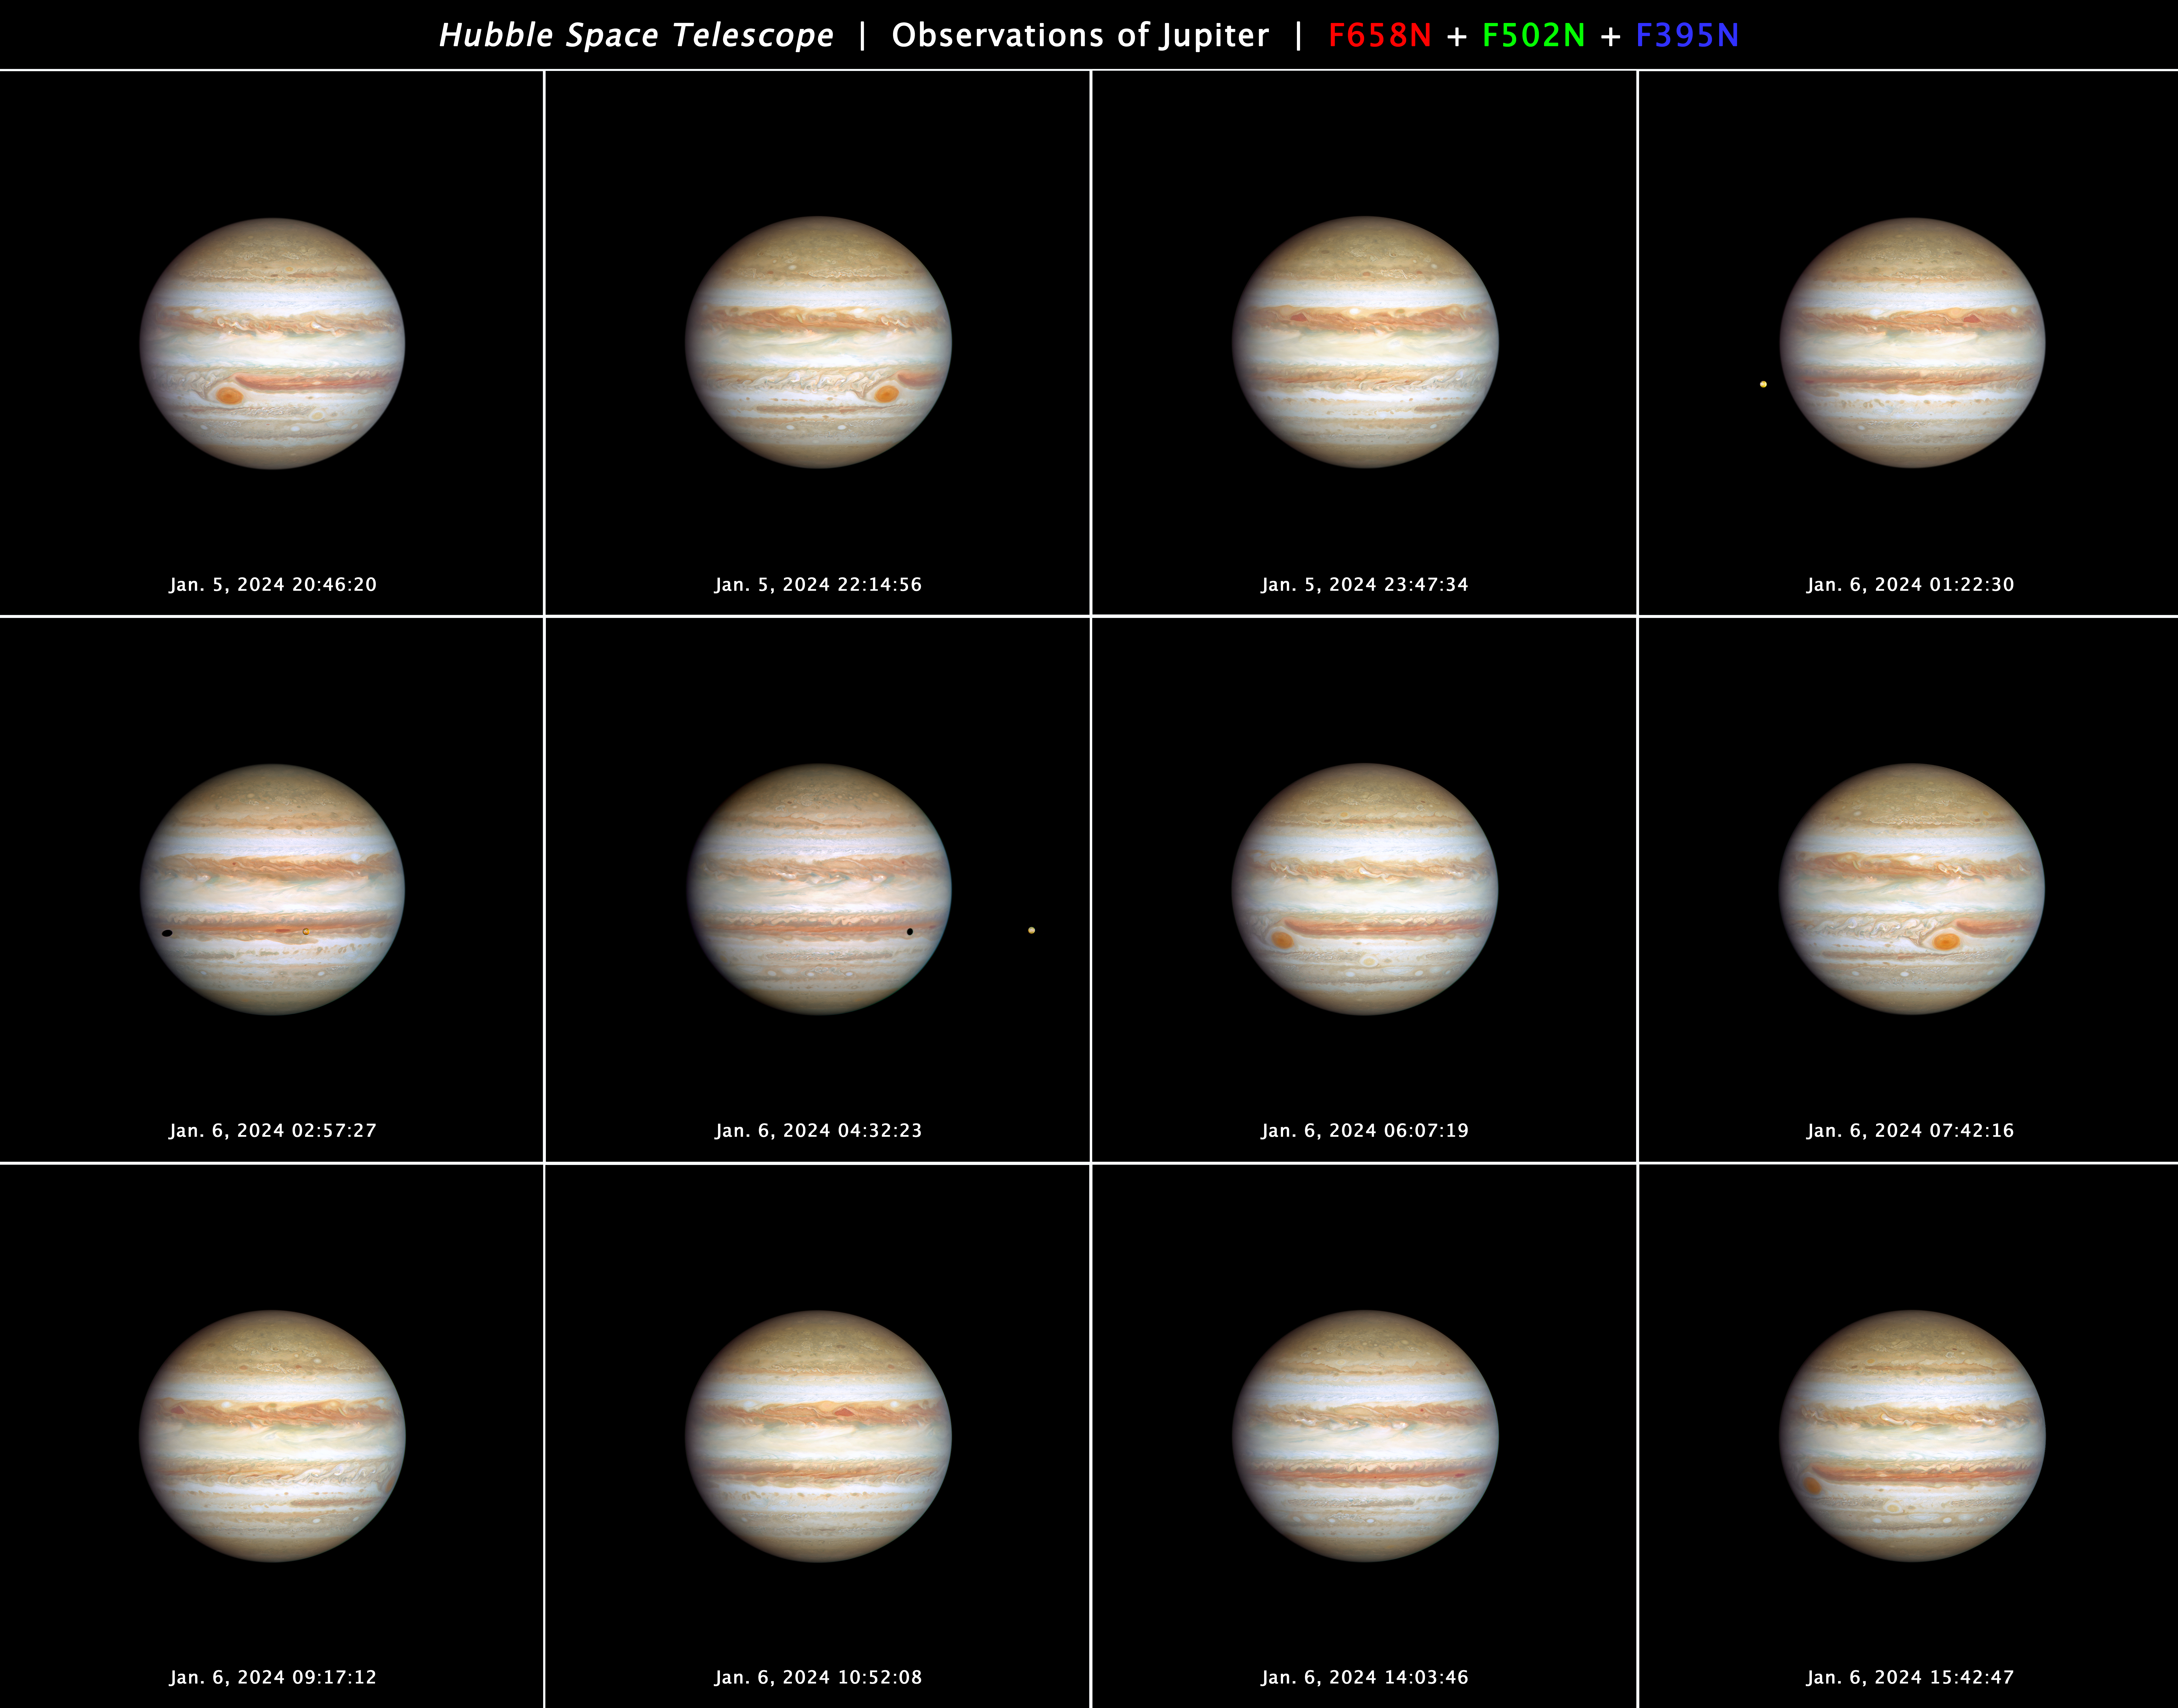

Jupiter OPAL observations (January 2024)

This 12-panel series of NASA/ESA Hubble Space Telescope images, taken on 5–6 January 2024, presents snapshots of a full rotation of the giant planet Jupiter. The Great Red Spot can be used to measure the planet's real rotation rate of nearly 10 hours. The innermost Galilean satellite, Io, is seen in several frames, along with its shadow crossing over Jupiter's cloud tops. Hubble monitors Jupiter and the other outer Solar System planets every year under the Outer Planet Atmospheres Legacy programme (OPAL).

Credit: NASA, ESA, J. DePasquale (STScI), A. Simon (NASA-GSFC)